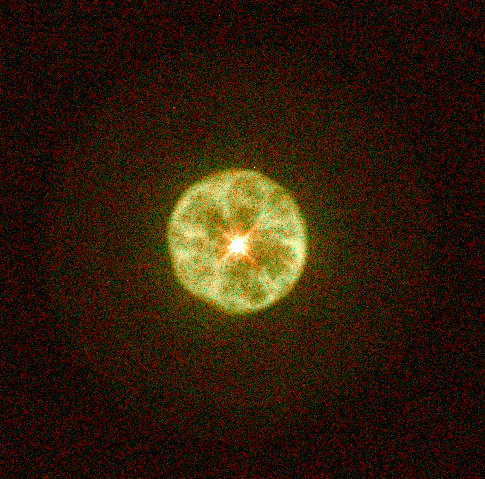

Hubble's Planetary Nebula Gallery. A View of IC 3568

IC 3568 lies in the constellation Camelopardalis at a distance of about 9, 000 light-years, and has a diameter of about 0.4 light-years (or about 800 times the diameter of our solar system). It is an example of a round planetary nebula. Note the bright inner shell and fainter, smooth, circular outer envelope.

Credit: Howard Bond ( Space Telescope Science Institute), Robin Ciardullo (Pennsylvania State University) and NASA/ESA